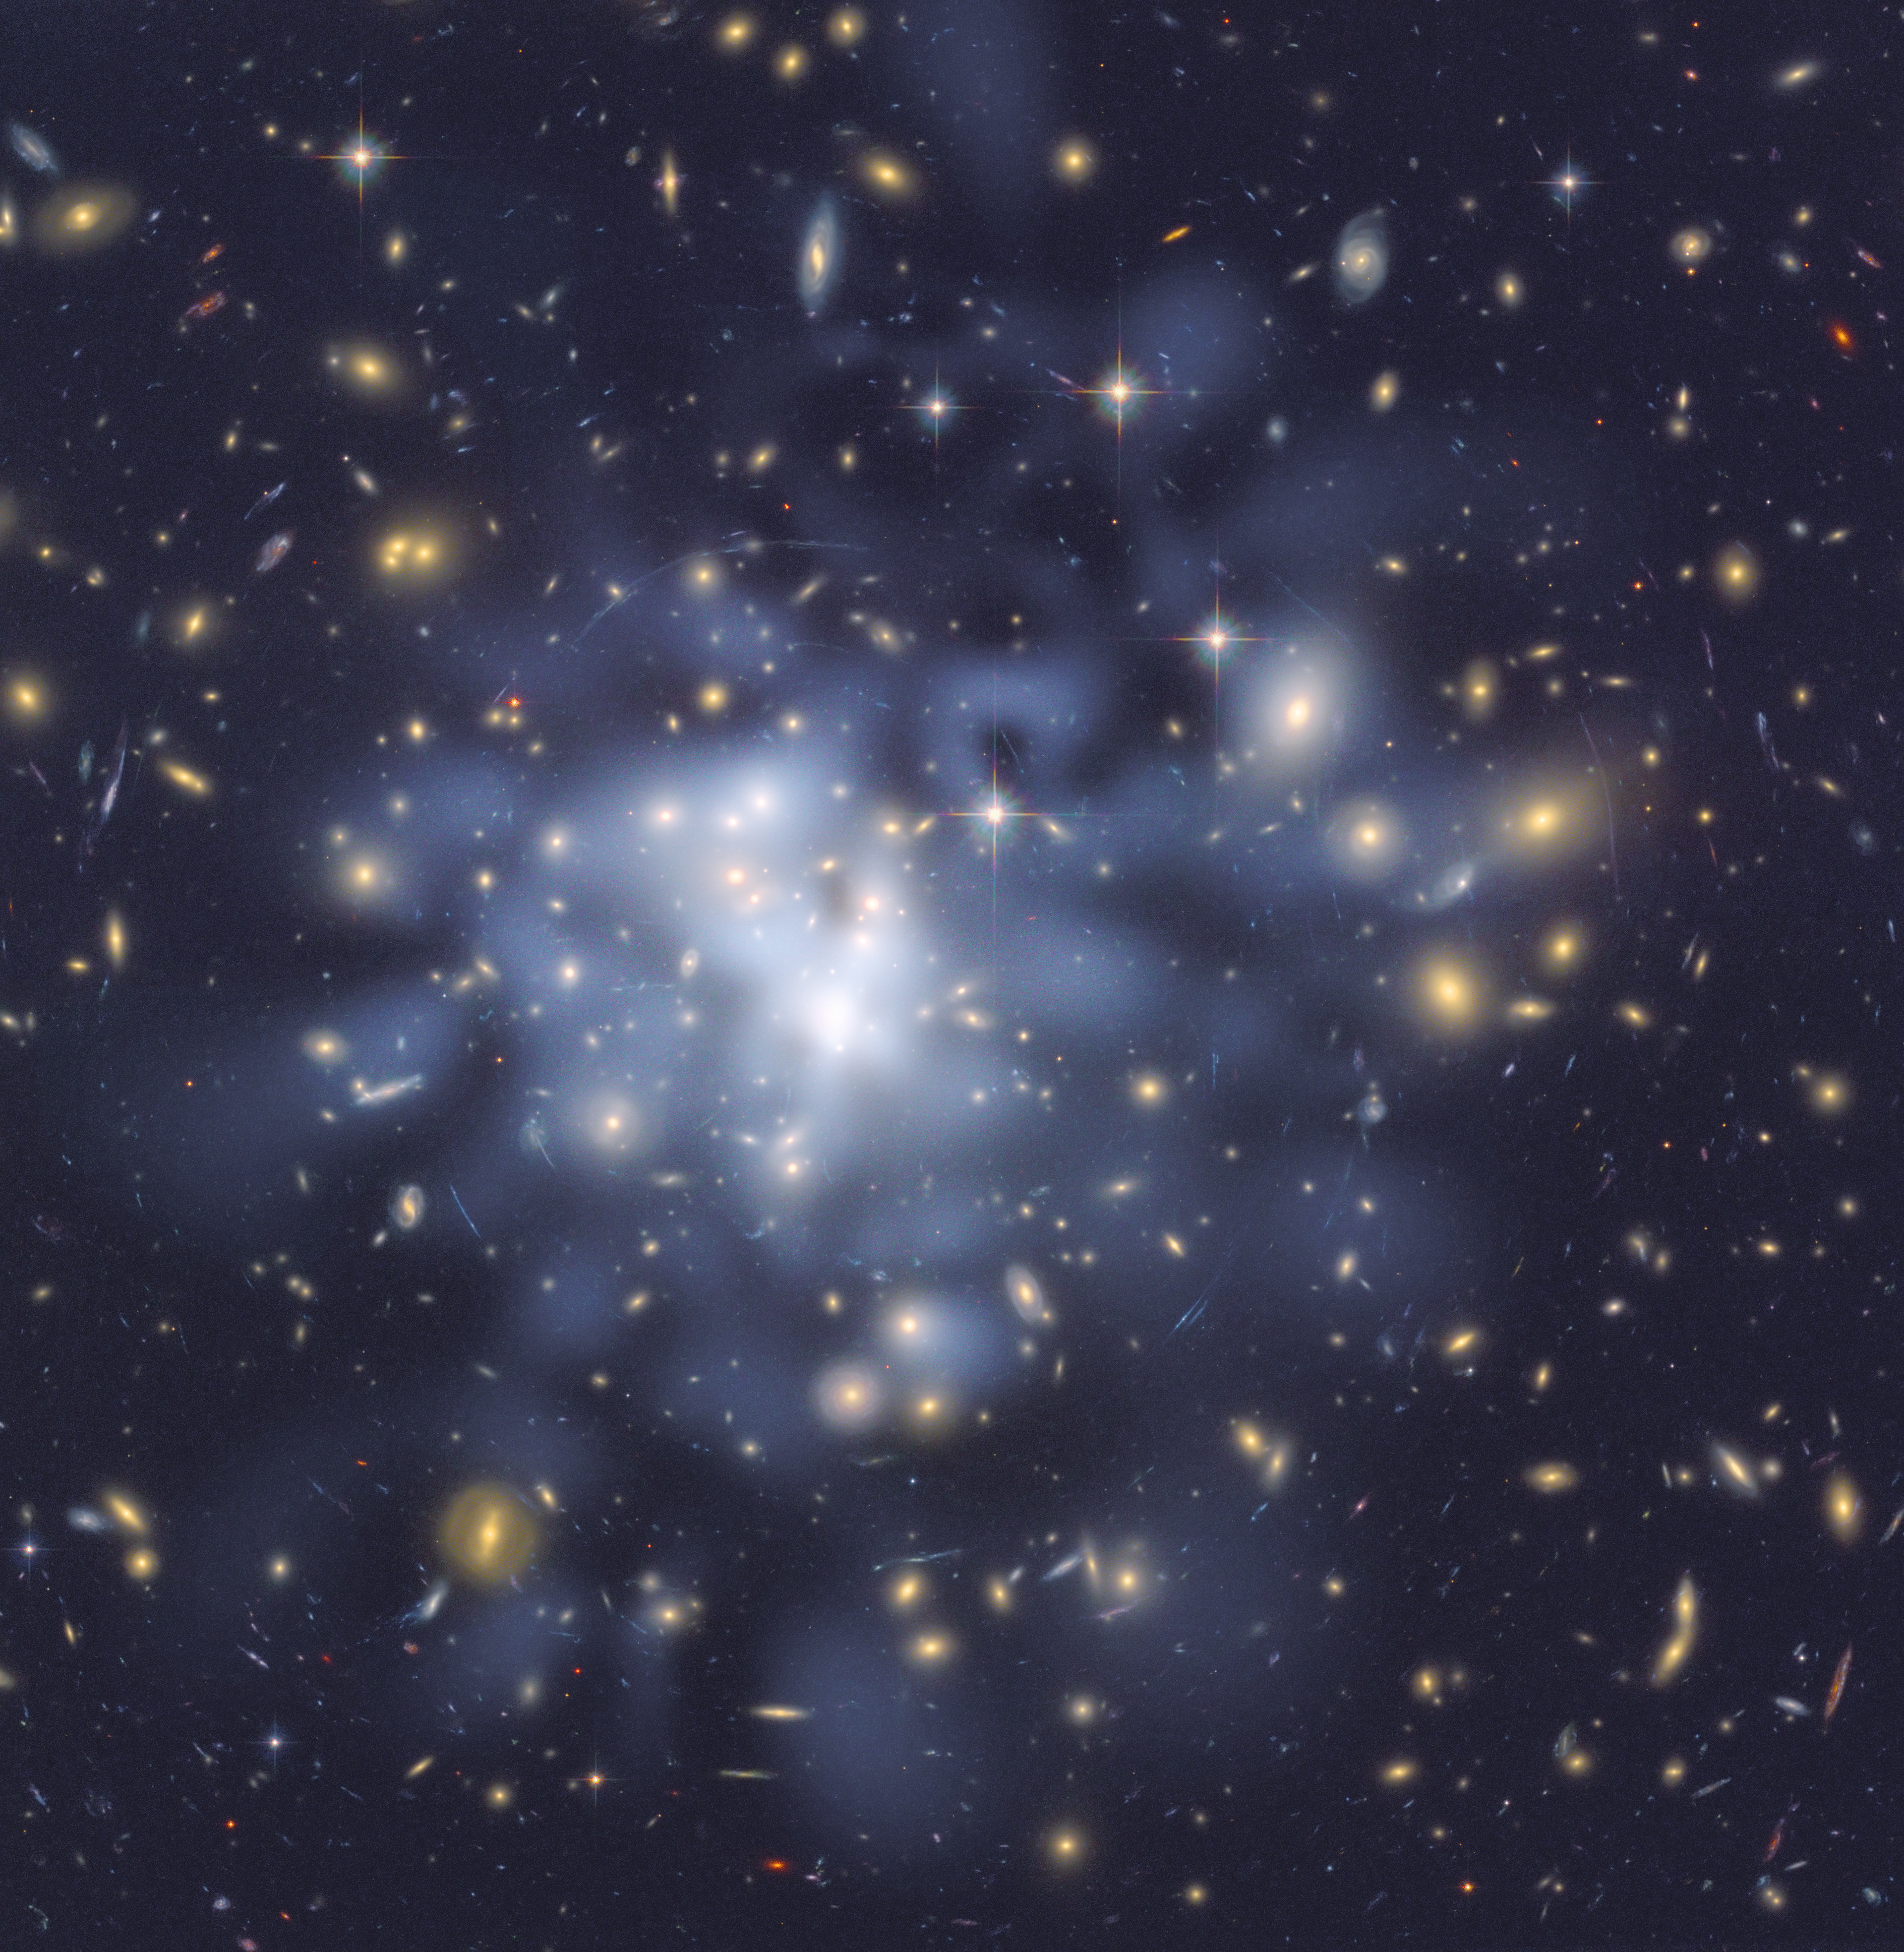

Hubble helps astronomers map dark matter in Abell 1689

This NASA/ESA Hubble Space Telescope image shows the distribution of dark matter in the centre of the giant galaxy cluster Abell 1689, containing about 1,000 galaxies and trillions of stars.

Dark matter is an invisible form of matter that accounts for most of the universe's mass. Hubble cannot see the dark matter directly. Astronomers inferred its location by analyzing the effect of gravitational lensing, where light from galaxies behind Abell 1689 is distorted by intervening matter within the cluster.

Researchers used the observed positions of 135 lensed images of 42 background galaxies to calculate the location and amount of dark matter in the cluster. They superimposed a map of these inferred dark matter concentrations, tinted blue, on an image of the cluster taken by Hubble's Advanced Camera for Surveys. If the cluster's gravity came only from the visible galaxies, the lensing distortions would be much weaker. The map reveals that the densest concentration of dark matter is in the cluster's core.

Abell 1689 resides 2.2 billion light-years from Earth. The image was taken in June 2002.

Credit: NASA, ESA, D. Coe (NASA Jet Propulsion Laboratory/California Institute of Technology, and Space Telescope Science Institute), N. Benítez (Institute of Astrophysics of Andalucía, Spain), T. Broadhurst (University of the Basque Country, Spain), and H. Ford (Johns Hopkins University, USA)